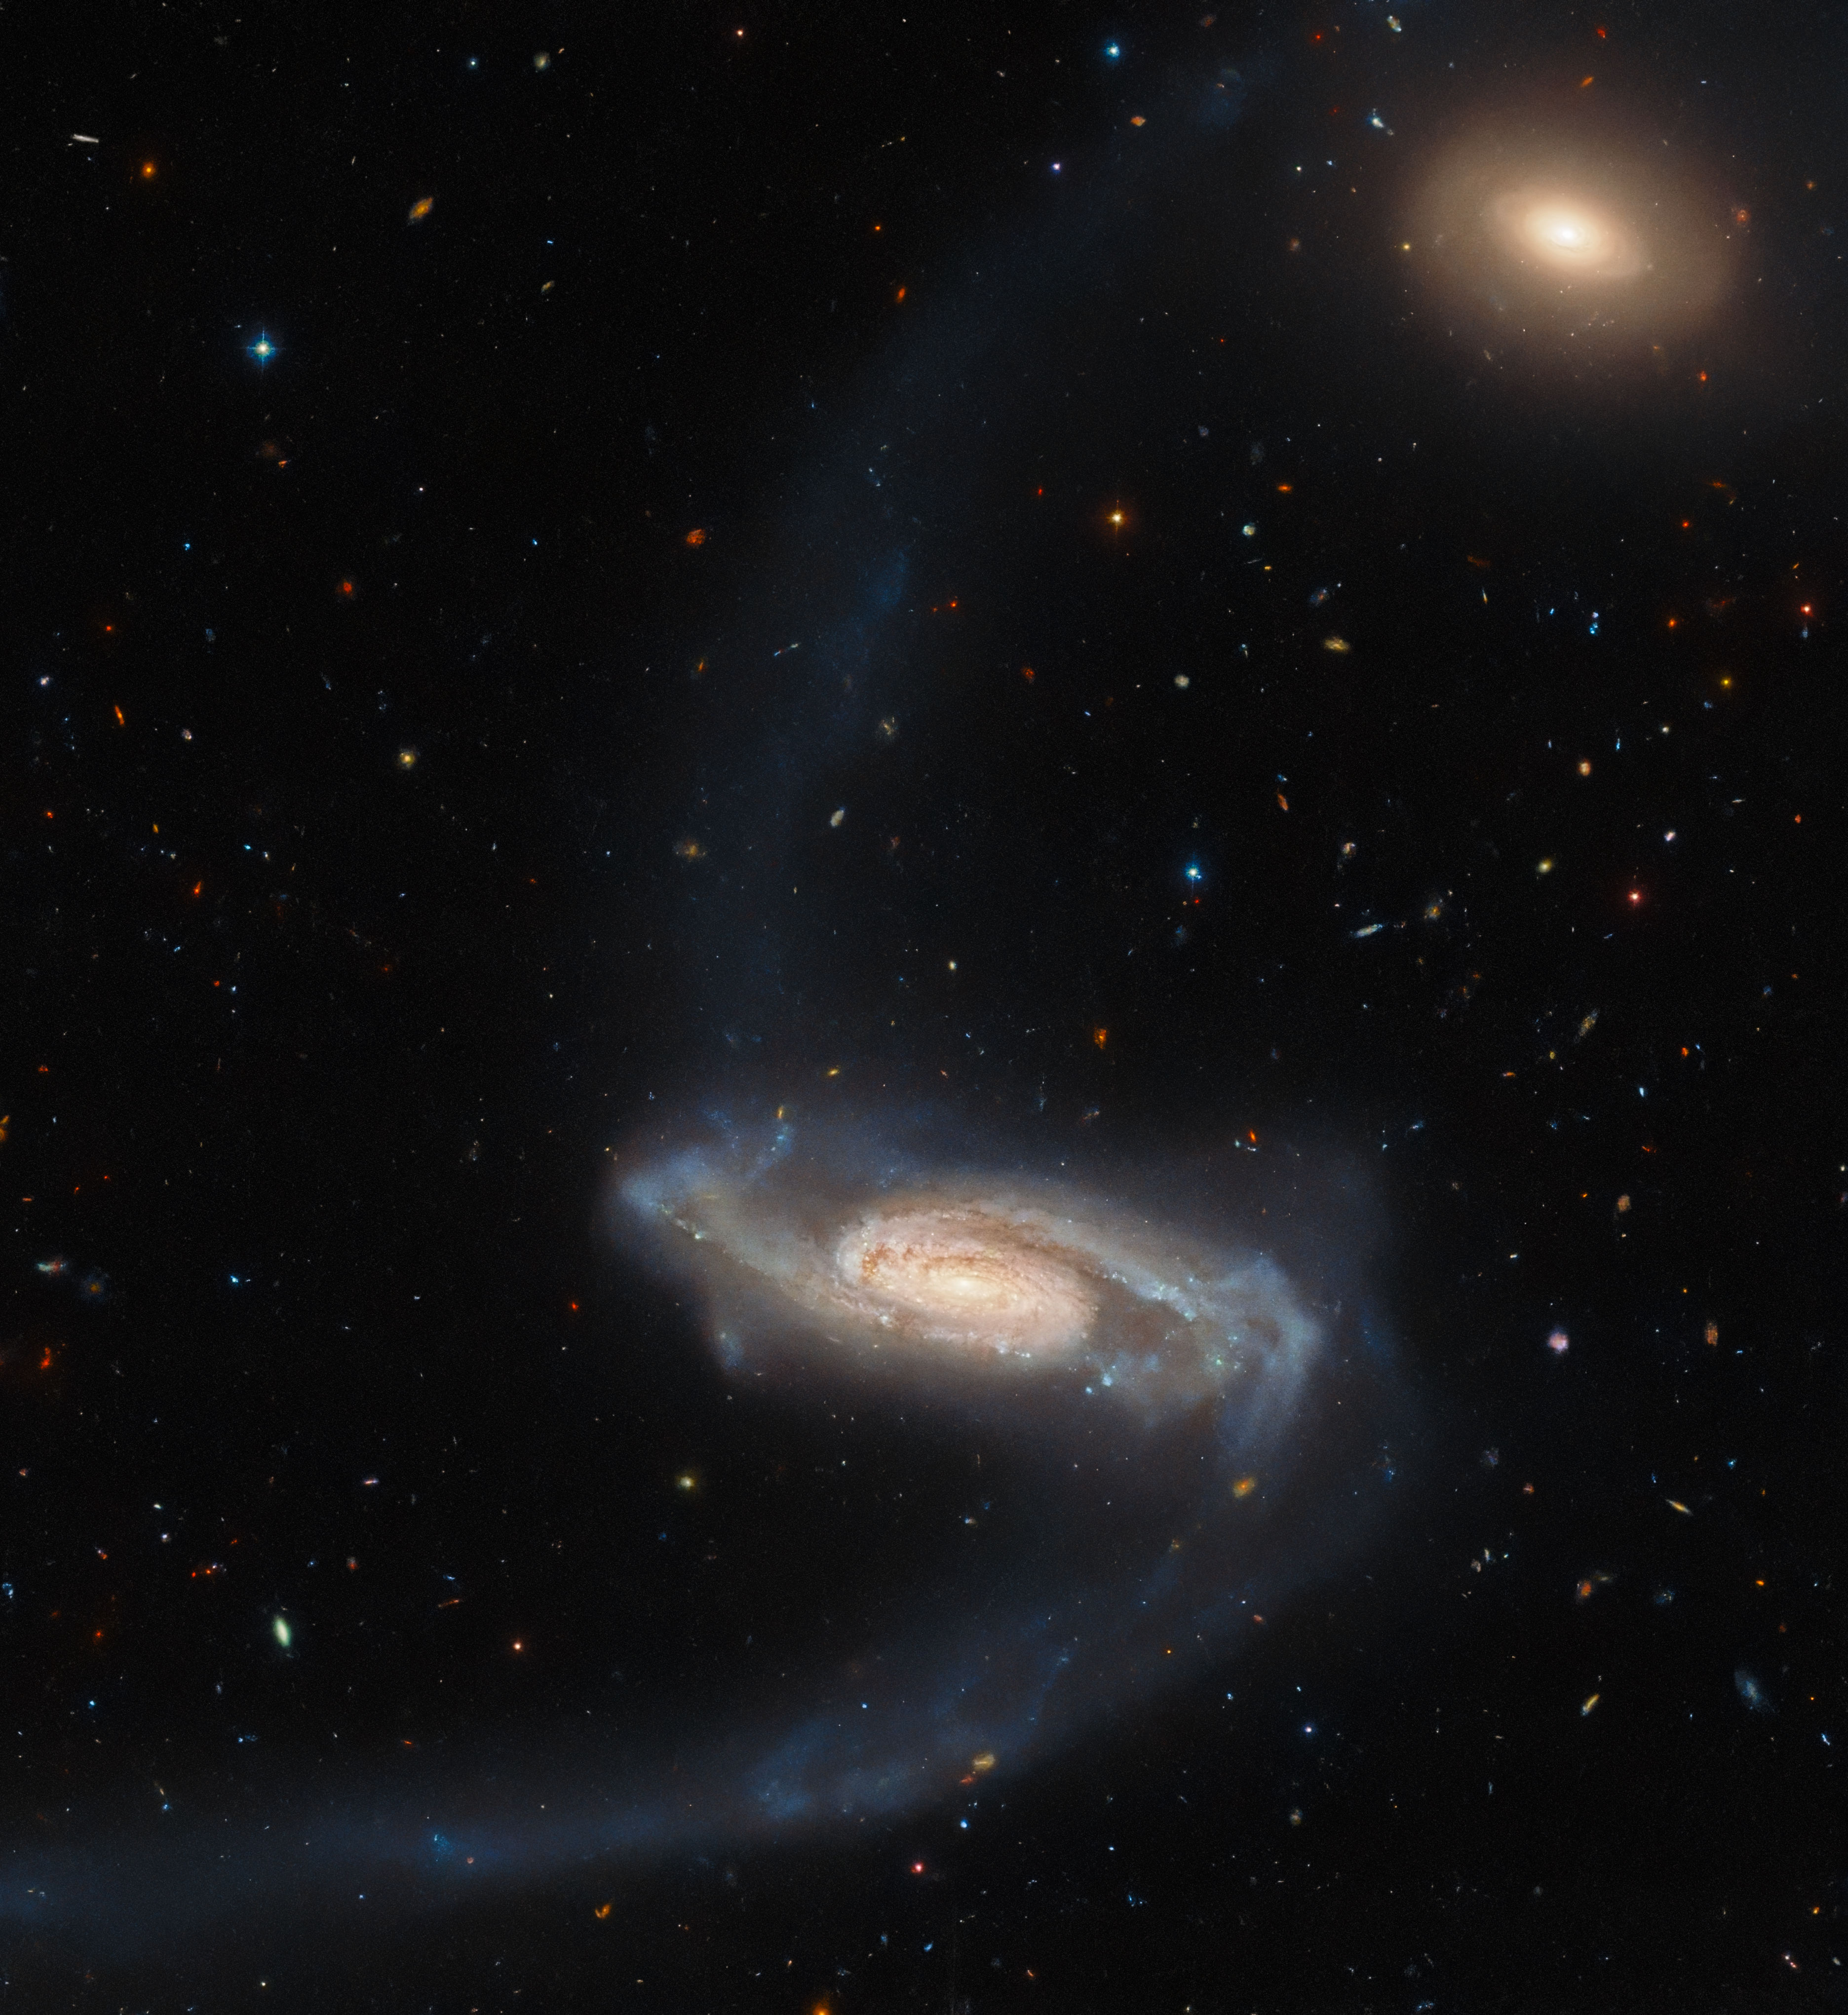

Hubble Spies a Long-Armed Galaxy

The peculiar spiral galaxy ESO 415-19, which lies around 450 million light-years away, stretches lazily across this image from the NASA/ESA Hubble Space Telescope. While the centre of this object resembles a regular spiral galaxy, long streams of stars stretch out from the galactic core like bizarrely elongated spiral arms. These are tidal streams caused by some chance interaction in the galaxy’s past, and give ESO 415-19 a distinctly peculiar appearance.

ESO 415-19’s peculiarity made it a great target for Hubble. This observation comes from an ongoing campaign to explore the Arp Atlas of Peculiar Galaxies, a menagerie of some of the weirdest and most wonderful galaxies that the Universe has to offer. These galaxies range from bizarre lonesome galaxies to spectacularly interacting galaxy pairs, triplets, and even quintets. These space oddities are spread throughout the night sky, which means that Hubble can spare a moment to observe them as it moves between other observational targets.

This particular observation lies in a part of the night sky contained by the Fornax constellation. This constellation was also the site of a particularly important Hubble observation; the Hubble Ultra Deep Field. Creating the Ultra Deep Field required almost a million seconds of Hubble time, and captured nearly 10,000 galaxies of various ages, sizes, shapes, and colours. Just as climate scientists can recreate the planet’s atmospheric history from ice cores, astronomers can use deep field observations to explore slices of the Universe’s history from the present all the way to when the Universe was only 800 million years old!

Credit: ESA/Hubble & NASA, J. Dalcanton, Dark Energy Survey/DOE/FNAL/DECam/CTIO/NOIRLab/NSF/AURA